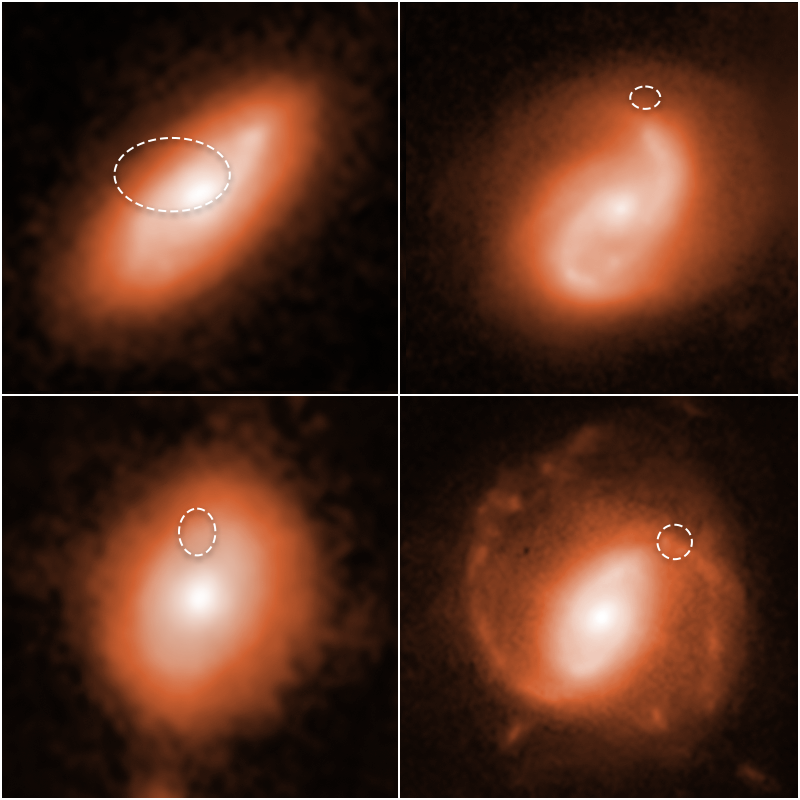

Fast Radio Burst Galaxies

Hunting for the neighborhoods of enigmatic, fast radio bursts (FRBs), astronomers using the NASA/ESA Hubble Space Telescope tracked four of them to the spiral arms of the four distant galaxies shown in the image. The bursts are catalogued as FRB 190714, at top left; FRB 191001, at top right; FRB 180924, at bottom left; and FRB 190608, at bottom right.

Because these radio pulses disappear in much less than the blink of an eye, researchers have had a hard time tracking down where they come from.

The galaxies are far from Earth, appearing as they looked billions of years ago. With the help of Hubble's sharp vision, astronomers pinpointed the fast radio bursts' location (denoted by the dotted oval lines) to the galaxies' spiral arms.

These galaxies are part of a survey to determine the origin of these brilliant flares, which can release as much energy in a thousandth of a second as the Sun does in a year.

Identifying the radio bursts' location helped researchers narrow the list of possible FRB sources that can generate such prodigious tsunamis of energy. One of the leading possible explanations is a torrential blast from a young magnetar. Magnetars are a type of neutron star with extraordinarily powerful magnetic fields.

The observations were made in ultraviolet and near-infrared light with Hubble's Wide Field Camera 3. The images were taken between November 2019 and April 2020.

Credit: NASA, ESA, A. Mannings (UC Santa Cruz), W. Fong (Northwestern), A. Pagan (STScI)